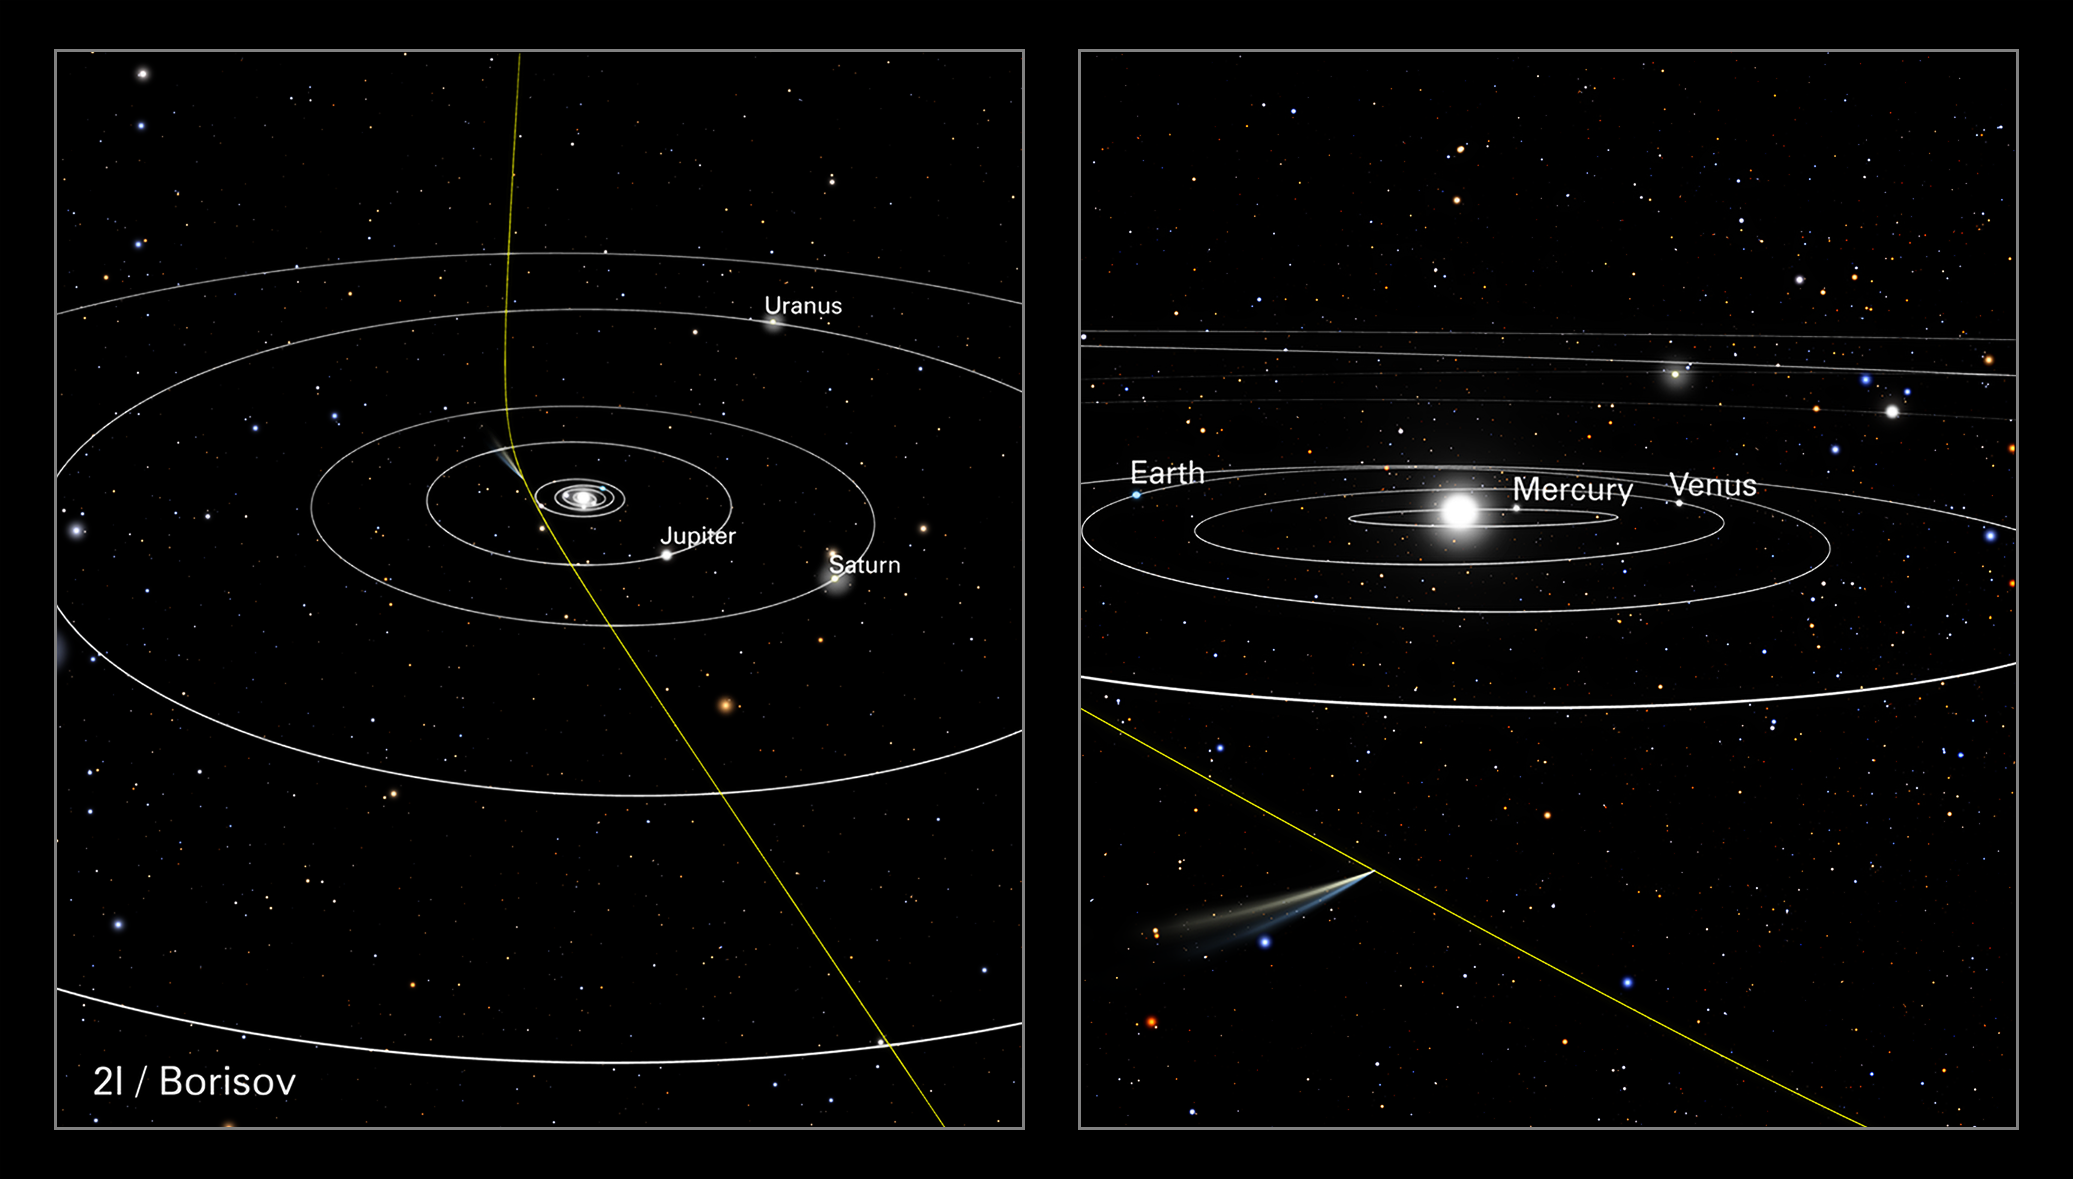

Orbital Path of Comet 2I/Borisov

This illustration shows the path of comet 21/Borisov through our Solar System. This visitor came from interstellar space along a hyperbolic trajectory. It is only the second known intruder to zoom through our Solar System (the interstellar object ‘Oumuamua was detected in 2017).

As the graphic shows, the comet’s straight path across interstellar space is slightly deflected by the gravitational pull of our Sun. The comet is travelling so fast, at over 155 000 kilometres per hour, it will eventually leave the Solar System.

The panel on the right shows the comet’s position relative to Earth when the NASA/ESA Hubble Space Telescope observed it on 12 October 2019, when it was 420 million kilometres from Earth.

Credit: NASA, ESA, J. Olmsted, F. Summers (STScI).